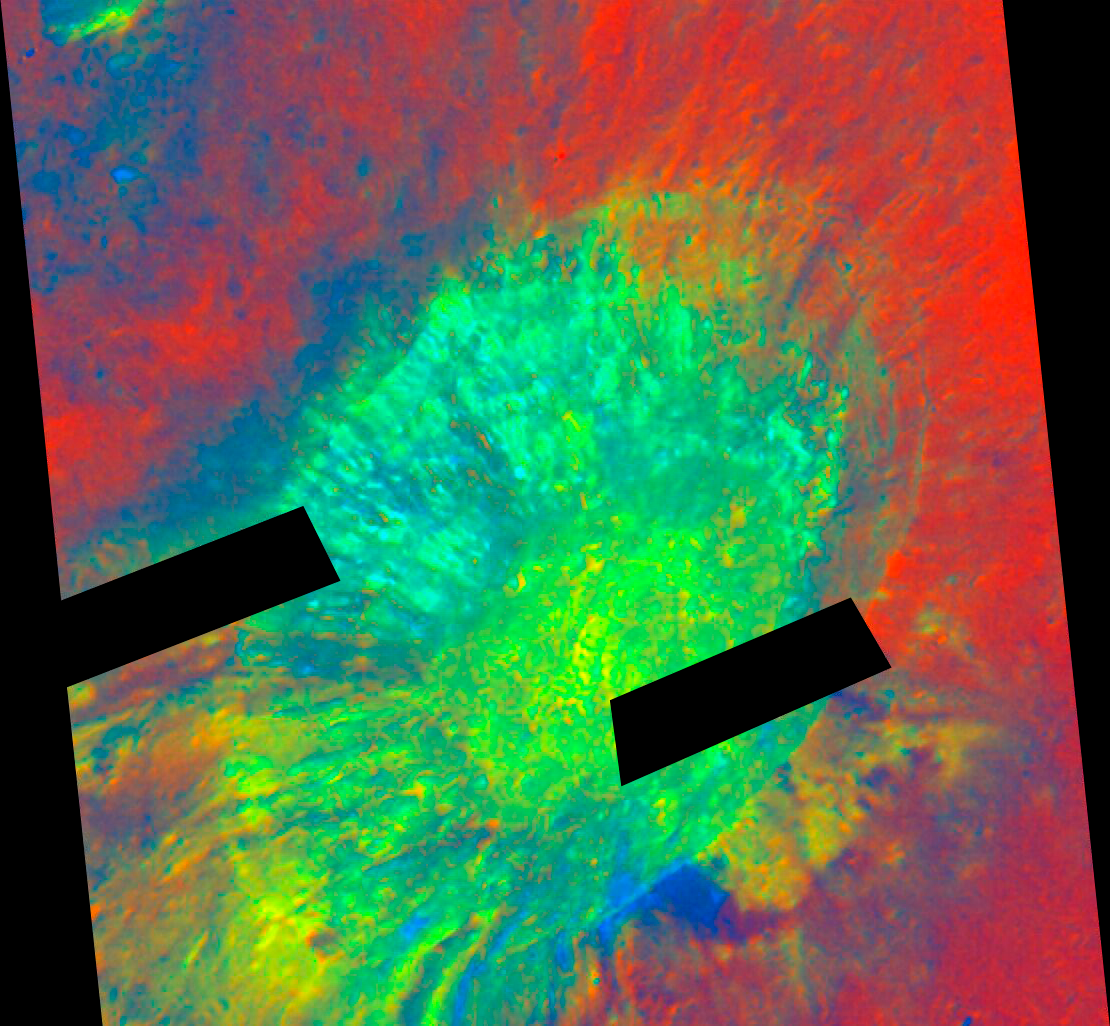

Aristarchus Crater in False Color

This colour composite focuses on the 42-kilometer-diameter Aristarchus impact crater, and employs ultraviolet- to visible-color-ratio information to accentuate differences that are potentially diagnostic of ilmenite- (i.e, titanium oxide) bearing materials as well as pyroclastic glasses. The symphony of colour within the Aristarchus crater clearly shows a diversity of materials - anorthosite, basalt, and olivine. The images were acquired Aug. 21, 2005. The processing was accomplished by the Hubble Space Telescope Lunar Exploration Team at NASA's Goddard Space Flight Center, Northwestern University, and the Space Telescope Science Institute. False-color images were constructed using the red channel as 502/250 nanometers; the green as 502 nanometers; and the blue as 250/658 nanometers. North is at the top in the image.

Credit: NASA, ESA, and J. Garvin (NASA/GSFC)